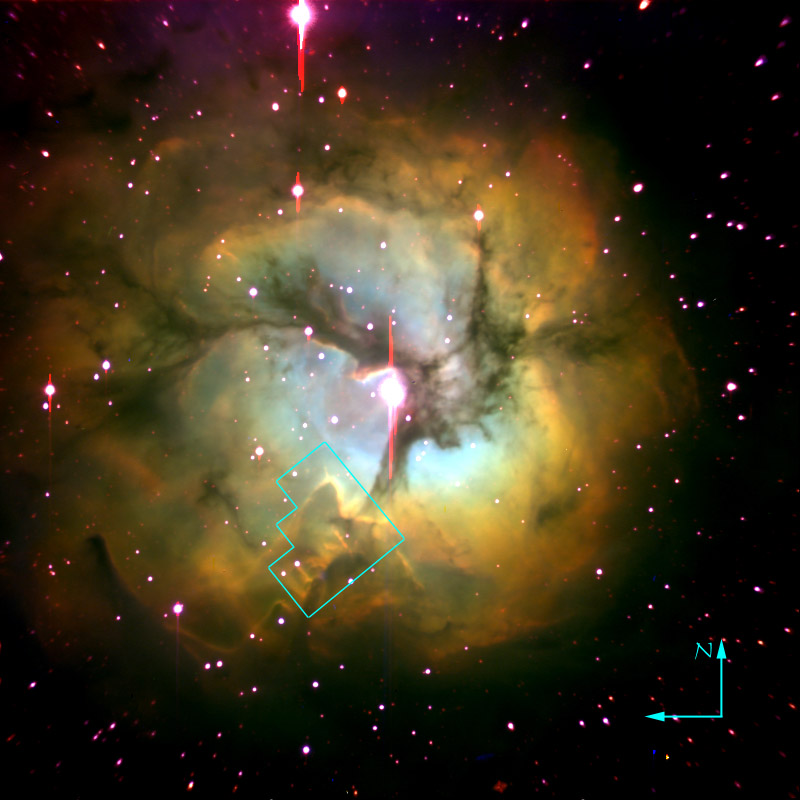

Trifid Nebula (ground-based image)

Ground (Palomar) image of the Trifid Nebula with location of WFPC2 field

Credit: Jeff Hester (Arizona State University)